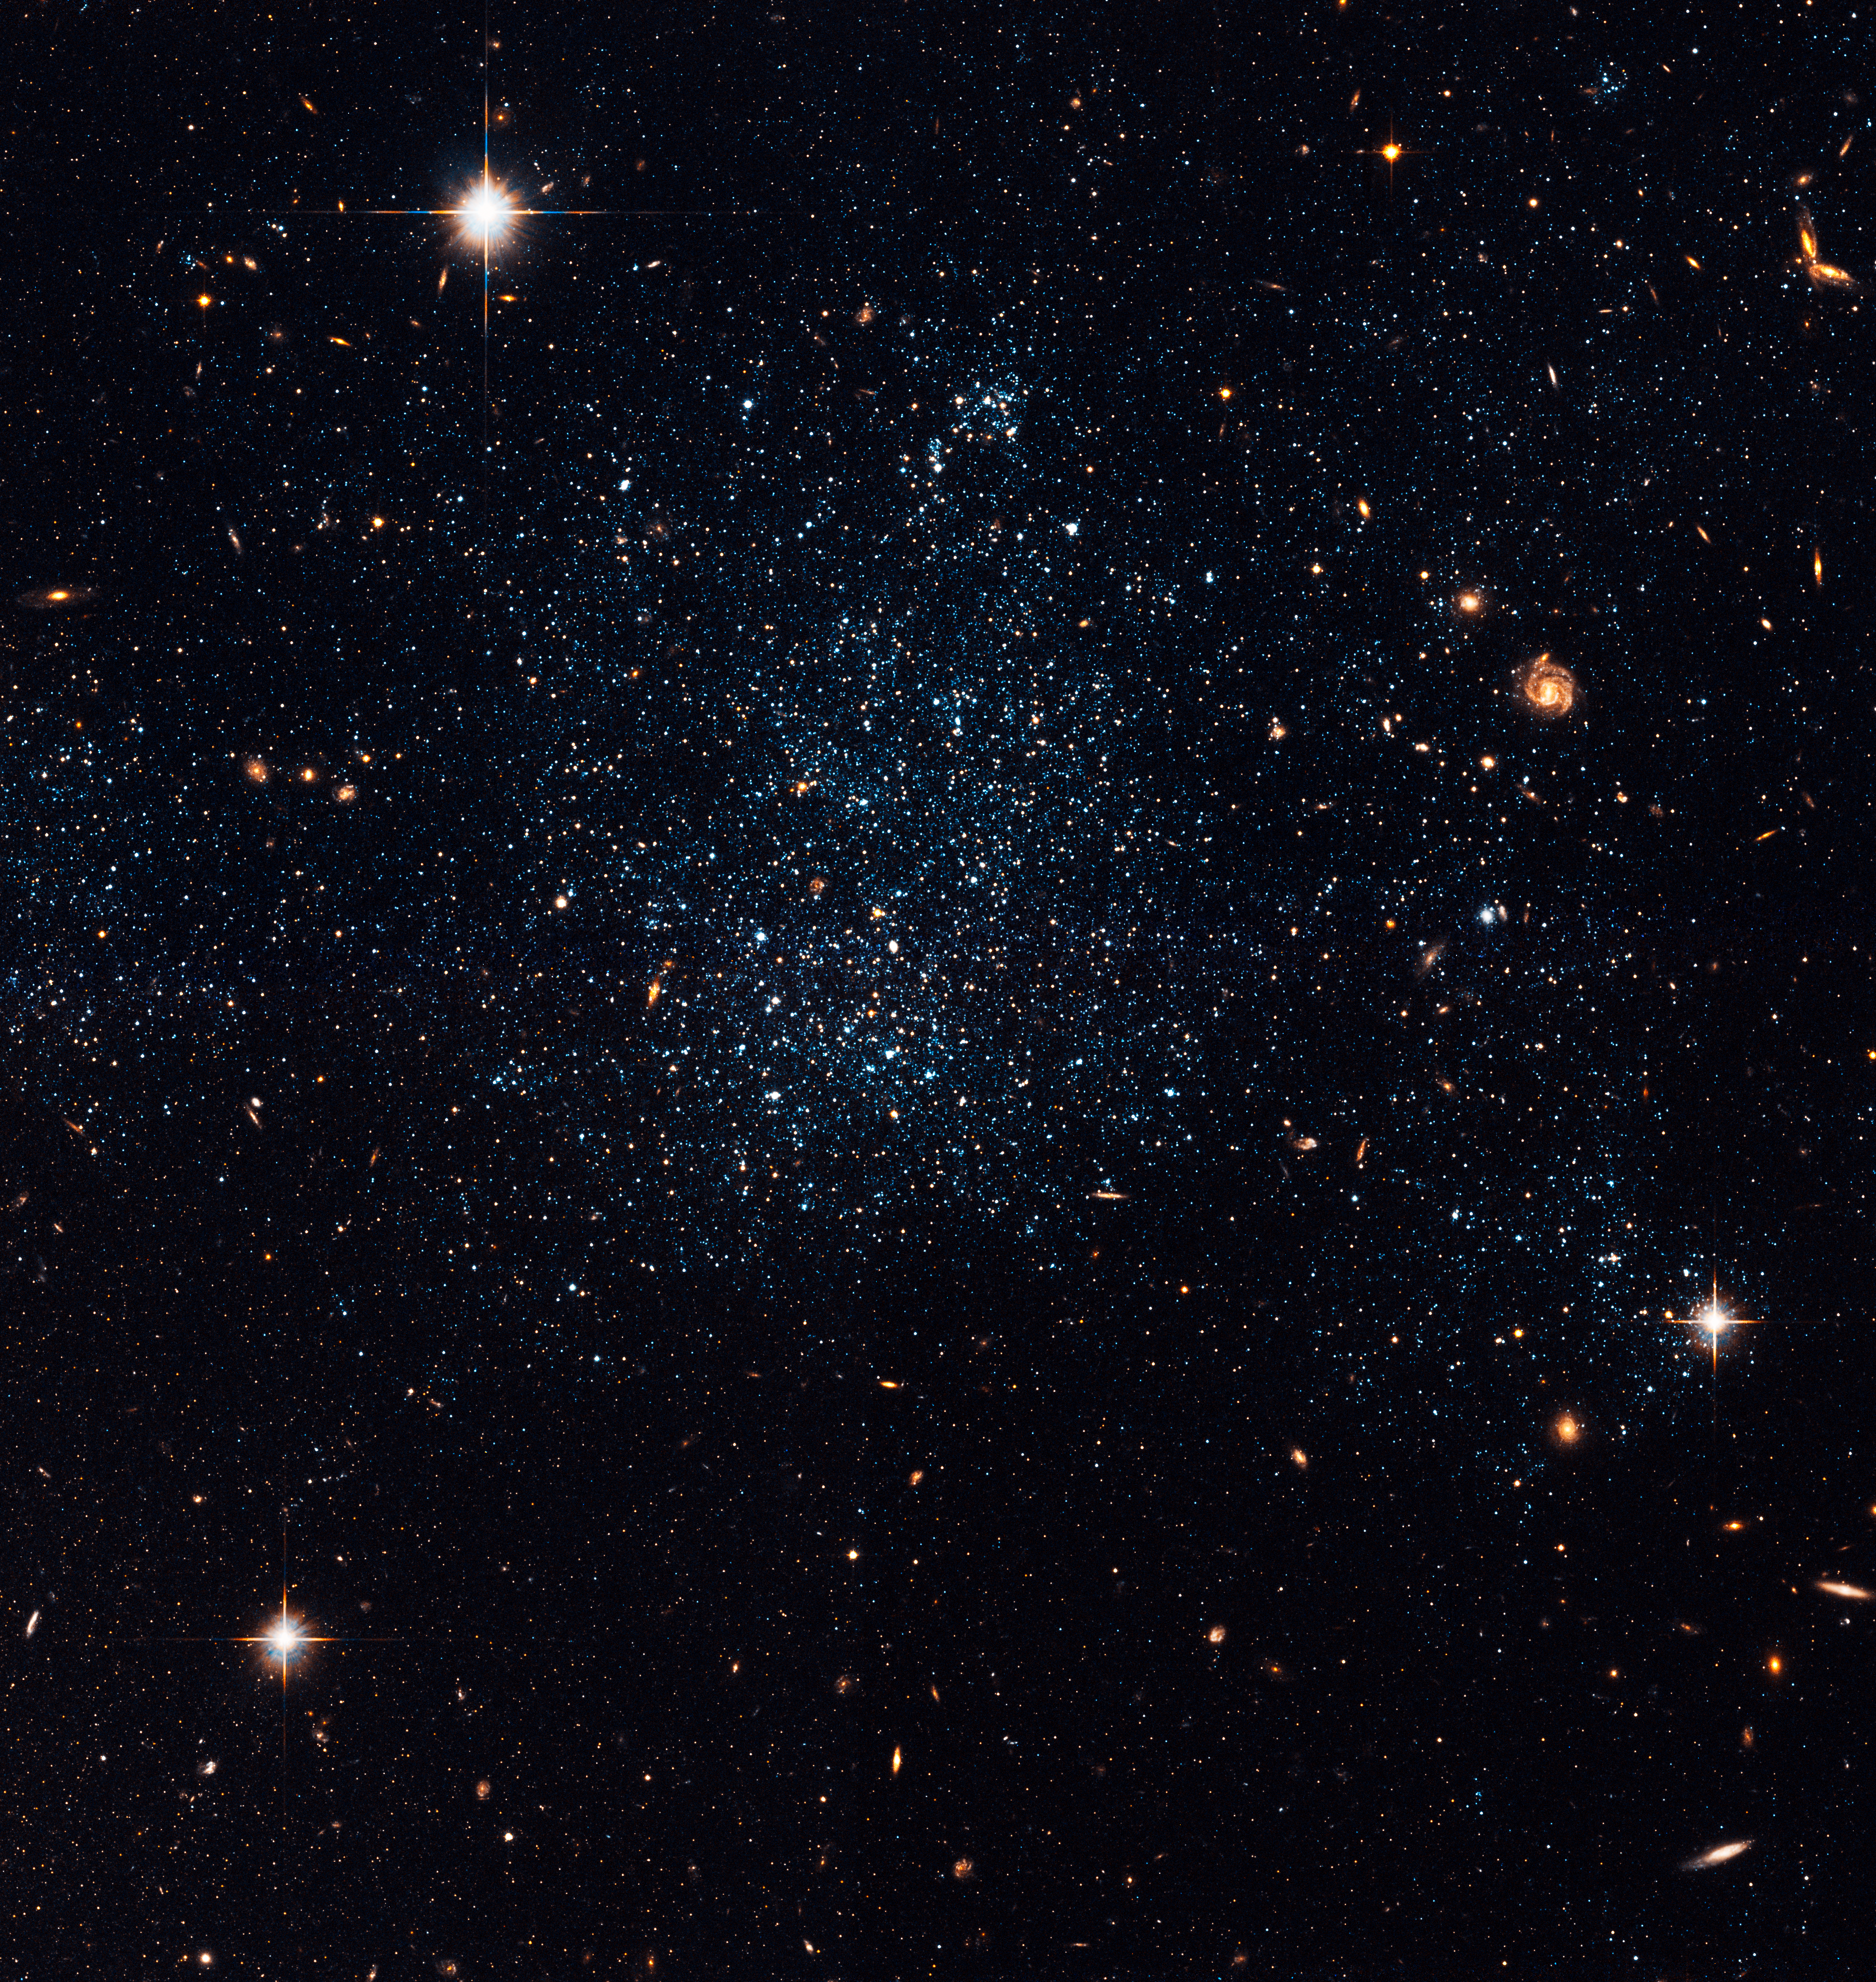

Dwarf Galaxy Holmberg IX

This loose collection of stars is actually a dwarf irregular galaxy, called Holmberg IX. It resides just off the outer edge of M81, a large spiral galaxy in Ursa Major. This image was taken with Hubble's Advanced Camera for Surveys in early 2006. Holmberg IX is of the so-called Magellanic type of galaxy, as its size and irregularity in structure are similar to the Small Magellanic Cloud, a neighbour to our own Milky Way. Holmberg IX was first discovered by astronomer Sidney van den Bergh in 1959, and catalogued as DDO 66. The galaxy received its "Holmberg IX" naming when it was discussed in Eric Holmberg's study of groups of galaxies ten years later. It is suspected that the dwarf galaxy was created as a result of a galactic interaction between M81 and neighbouring galaxy M82.

Of the more than 20,000 stars that can be resolved in this Hubble image, only about 10% are considered to be old stars with ages of billions of years. The rest are thought to be young stars with ages of only 10 - 200 million years. Due to the Advanced Camera for Surveys' resolution in this image, astronomers have noted that the old and the young stars have distinct spatial distributions which might be related to their origin.

Simulations predict that the triplet M81, M82, and nearby NGC 3077 had a close passage 200-300 million years ago. This close encounter may have triggered the newer star formation that has occurred in Holmberg IX.

The bluish-white fuzz in the space surrounding M81 and Holmberg IX is new star formation triggered by gravitational interactions between the two galaxies. There are many low mass galaxies that form stars in nearby space. While none of these are as dominated by recently produced stars as Holmberg IX, they might be related to the same family. By understanding how Holmberg IX was formed, scientists hope to understand their role as building blocks of large galaxies.

Credit: NASA, ESA, and the Hubble Heritage Team (STScI/AURA). Acknowledgment: D. de Mello (Catholic University of America and GSFC)